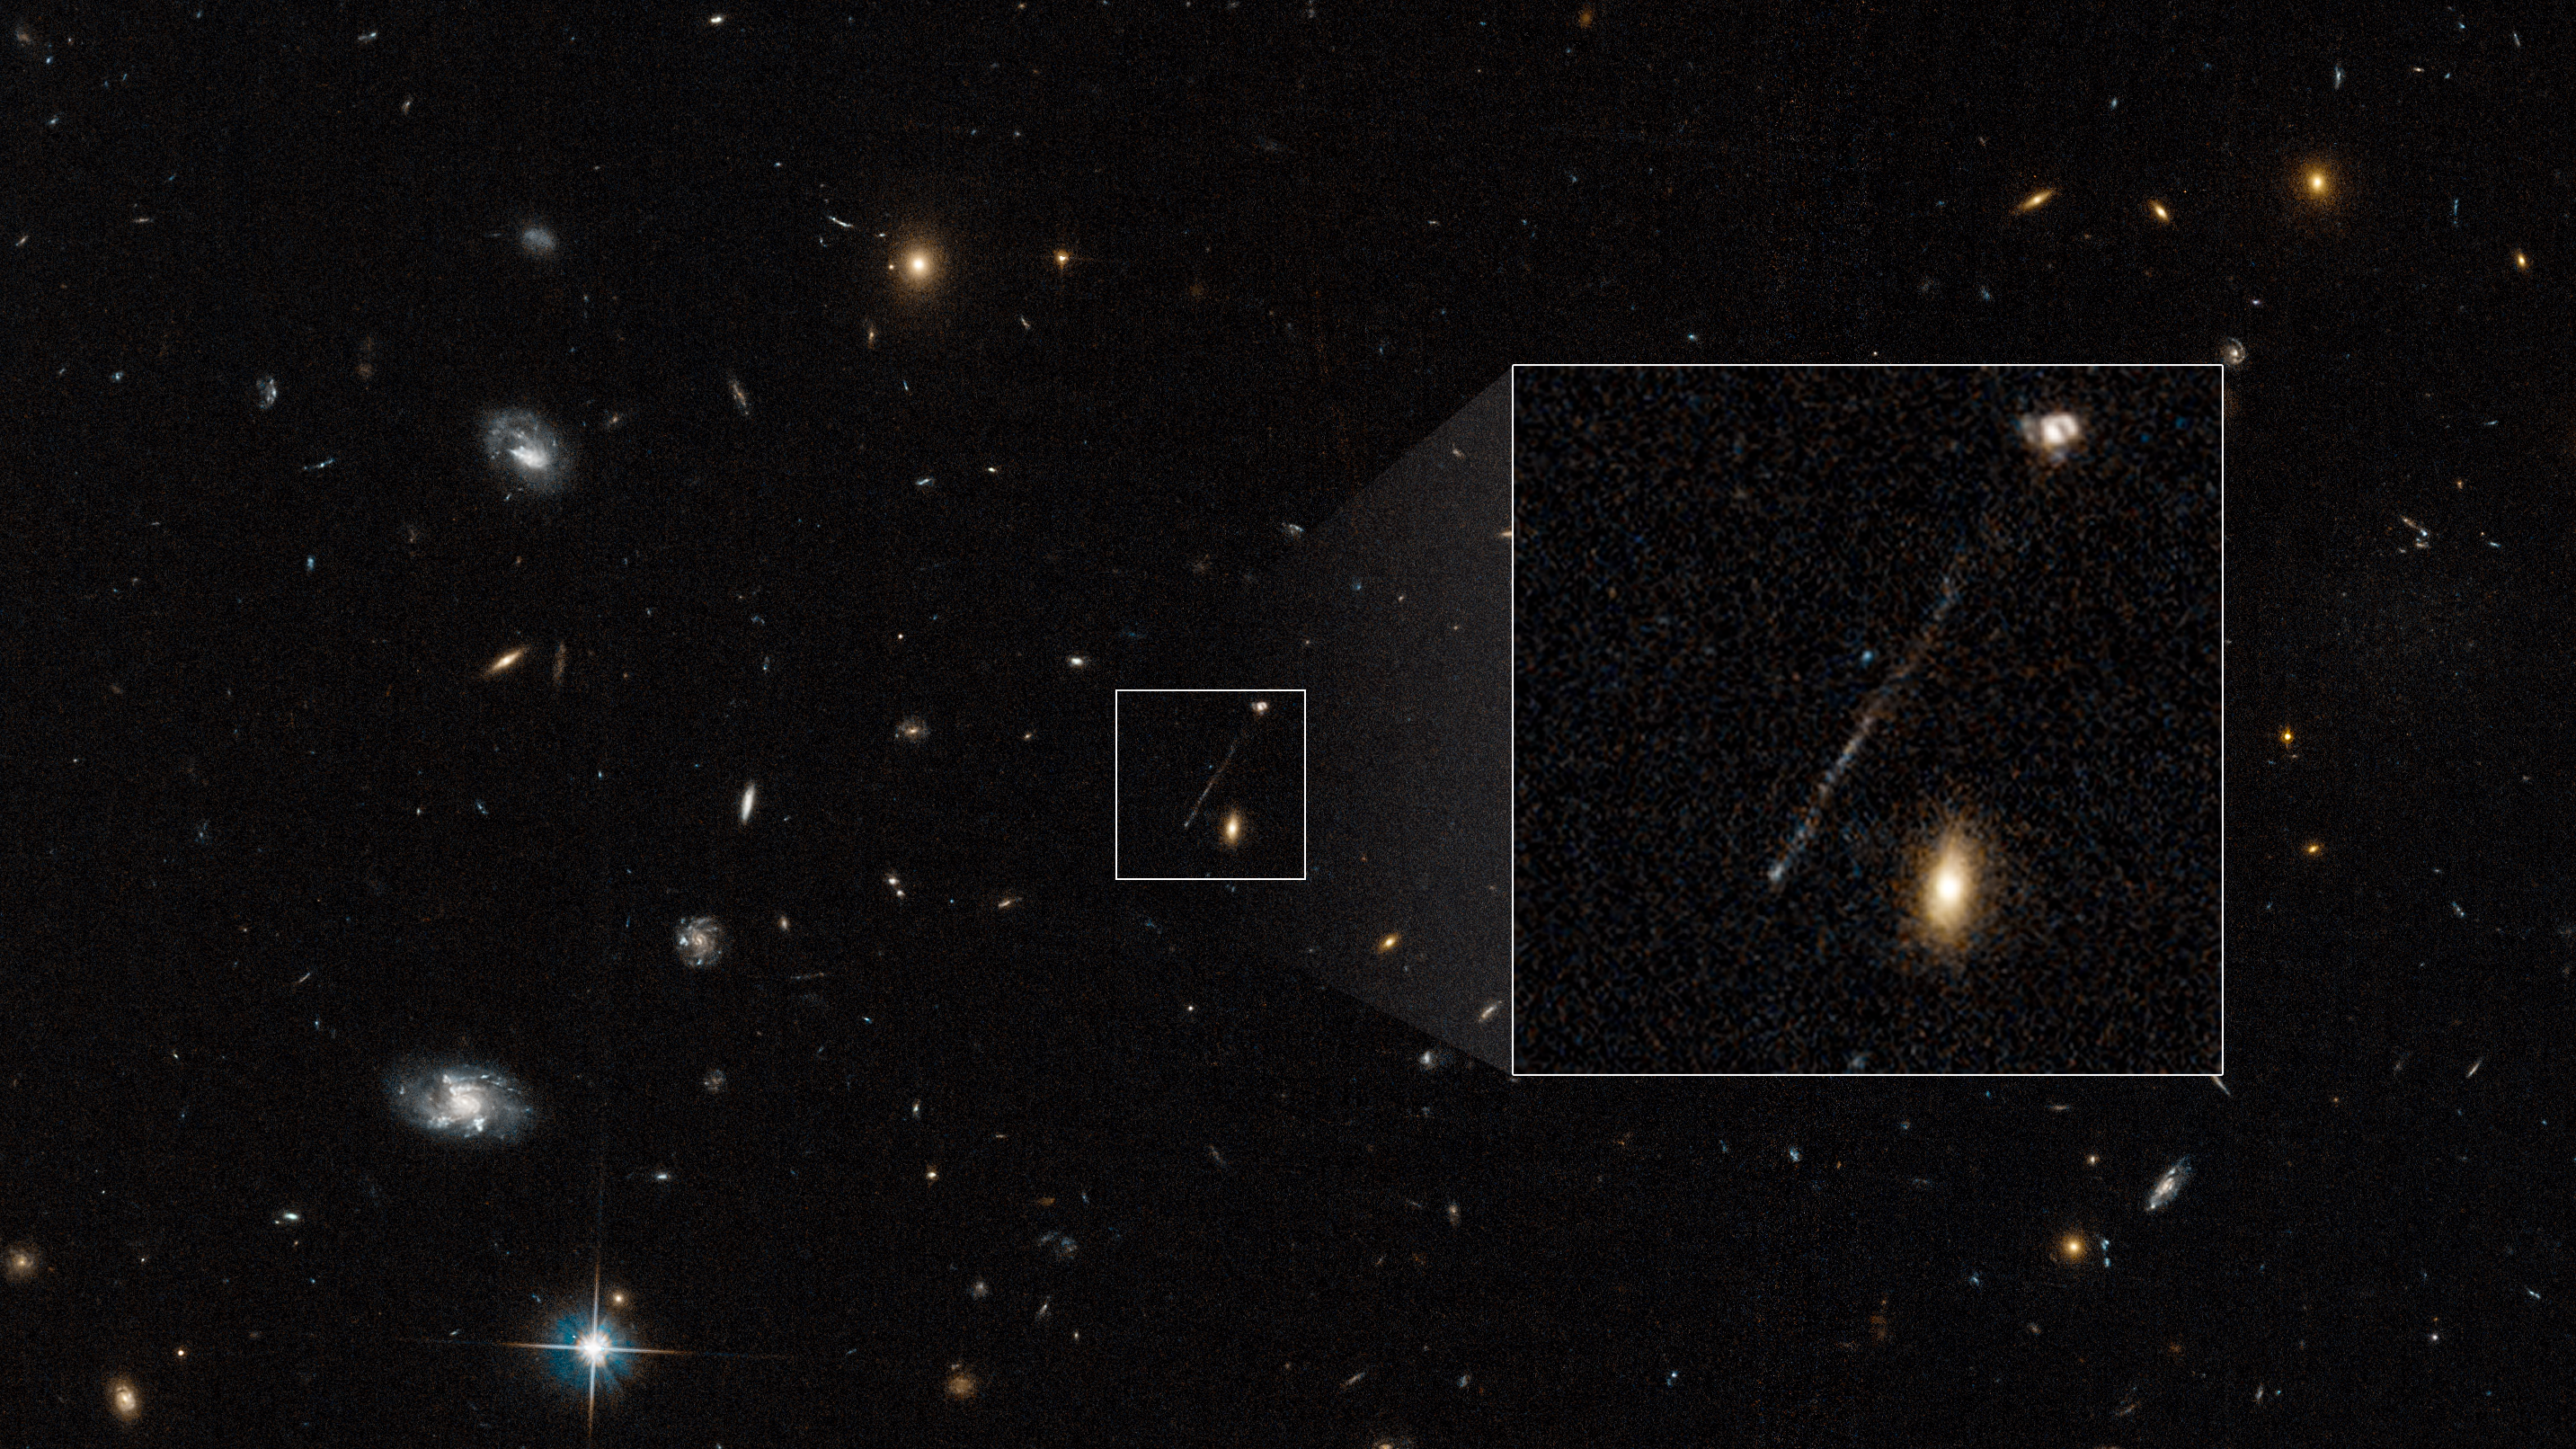

Hubble photographs stellar trail of runaway black hole

This archival image from the NASA/ESA Hubble Space Telescope captures a curious linear feature that is so unusual it was first dismissed as an imaging artifact from Hubble’s cameras. But follow-up spectroscopic observations reveal it is a 200 000-light-year-long chain of young blue stars. A supermassive black hole lies at the tip of the bridge at lower left. The black hole was ejected from the galaxy at upper right. It compressed gas in its wake to leave a long trail of young blue stars. Nothing like this has ever been seen before in the Universe. This unusual event happened when the Universe was approximately half its current age.

This intergalactic skyrocket is likely the result of multiple collisions of supermassive black holes. Astronomers suspect the first two galaxies merged perhaps 50 million years ago. That brought together two supermassive black holes at their centers. They whirled around each other as a binary black hole. When the single black hole took off in one direction, the binary black holes shot off in the opposite direction. There is a feature seen on the opposite side of the host galaxy that might be the runaway binary black hole. Circumstantial evidence for this is that there is no sign of an active black hole remaining at the galaxy’s core. The next step is to do follow-up observations with the NASA/ESA/CSA James Webb Space Telescope and NASA’s Chandra X-ray Observatory to confirm the black hole explanation.

These results are featured in the paper published on 6 April 2023 in the Astrophysical Journal Letters.

Credit: NASA, ESA, P. van Dokkum (Yale University)